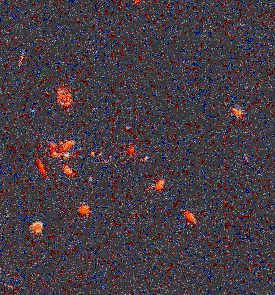

Distant galaxy cluster HST035528+09435

At an estimated distance of about 7 to 10 billion light-years (z=1), this is one of the farthest clusters in the Hubble sample. The cluster lies in the constellation of Taurus.

Credit: K. Ratnatunga, R. Griffiths (Carnegie Mellon University); and NASA/ESA